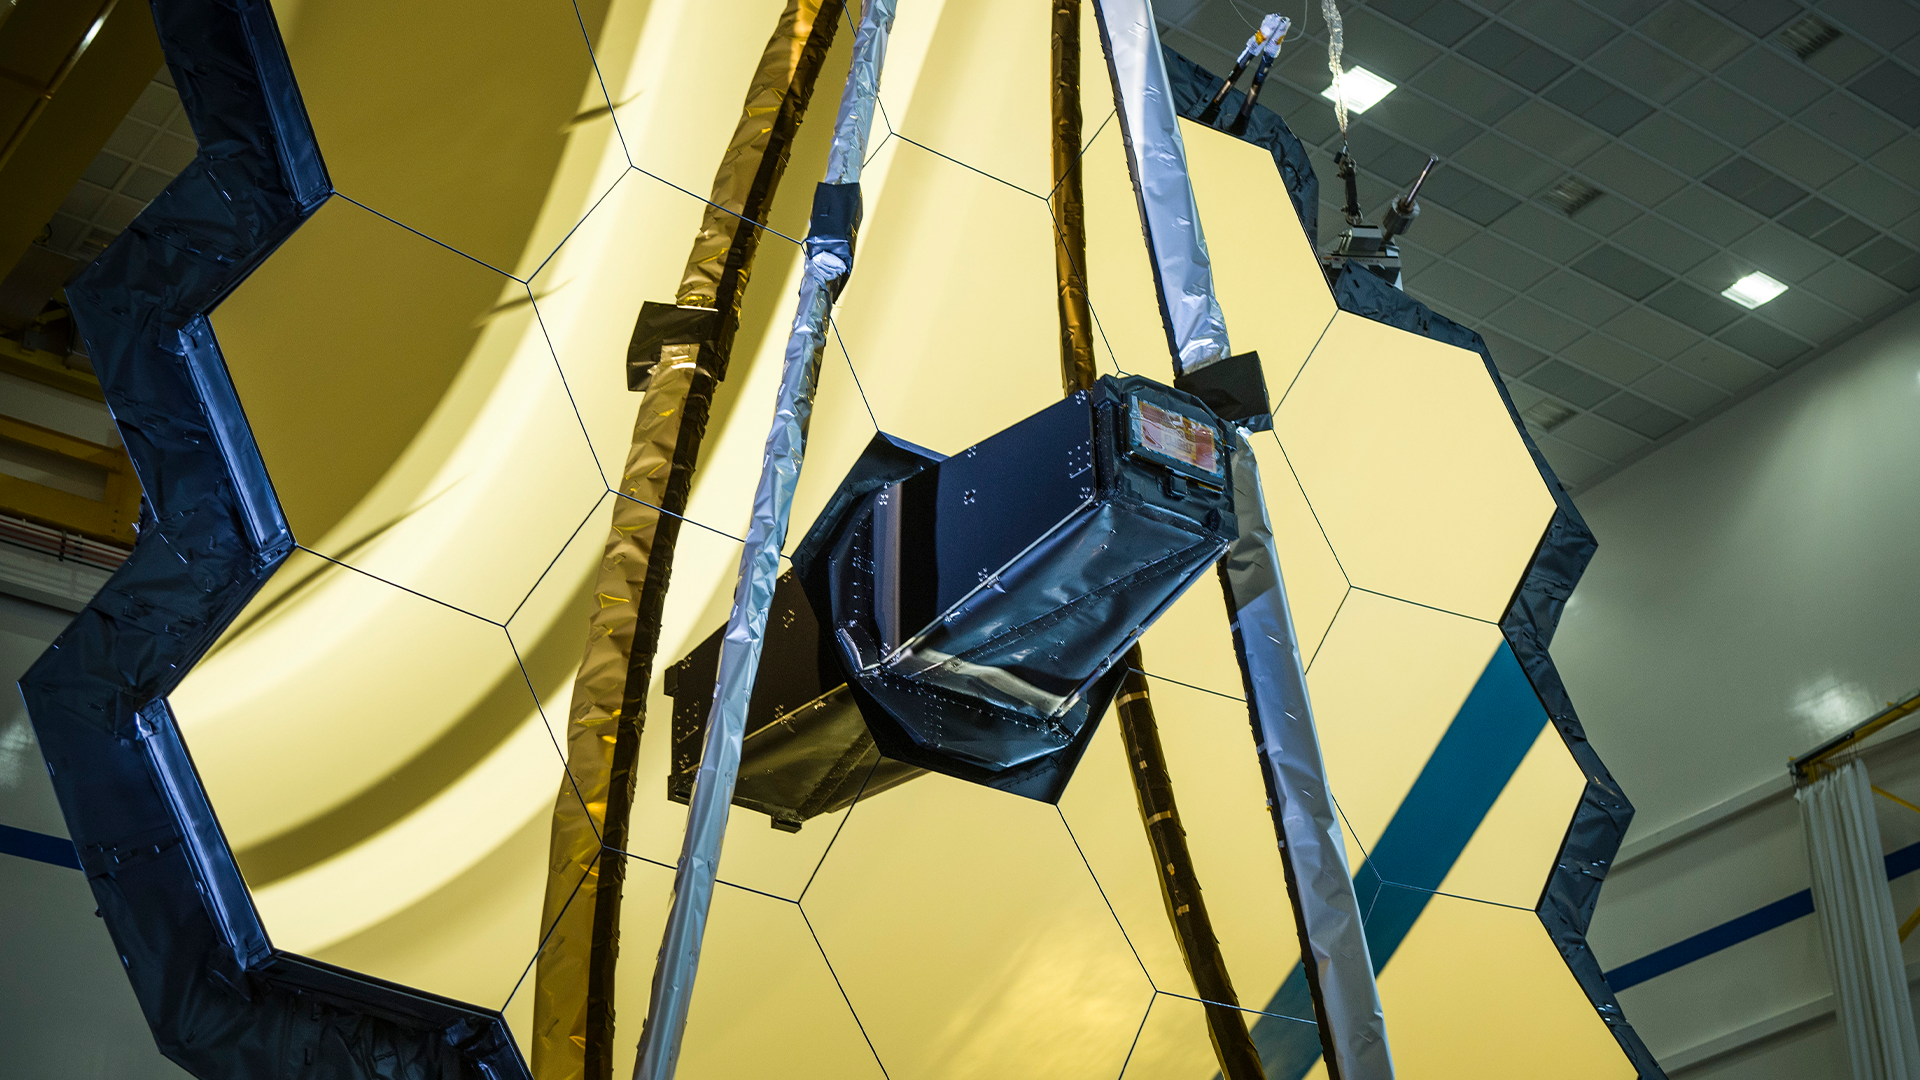

Image of the NASA/ESA/CSA James Webb Space Telescope from March 2020.

Image of the NASA/ESA/CSA James Webb Space Telescope from March 2020.

Credit: NASA/Chris Gunn